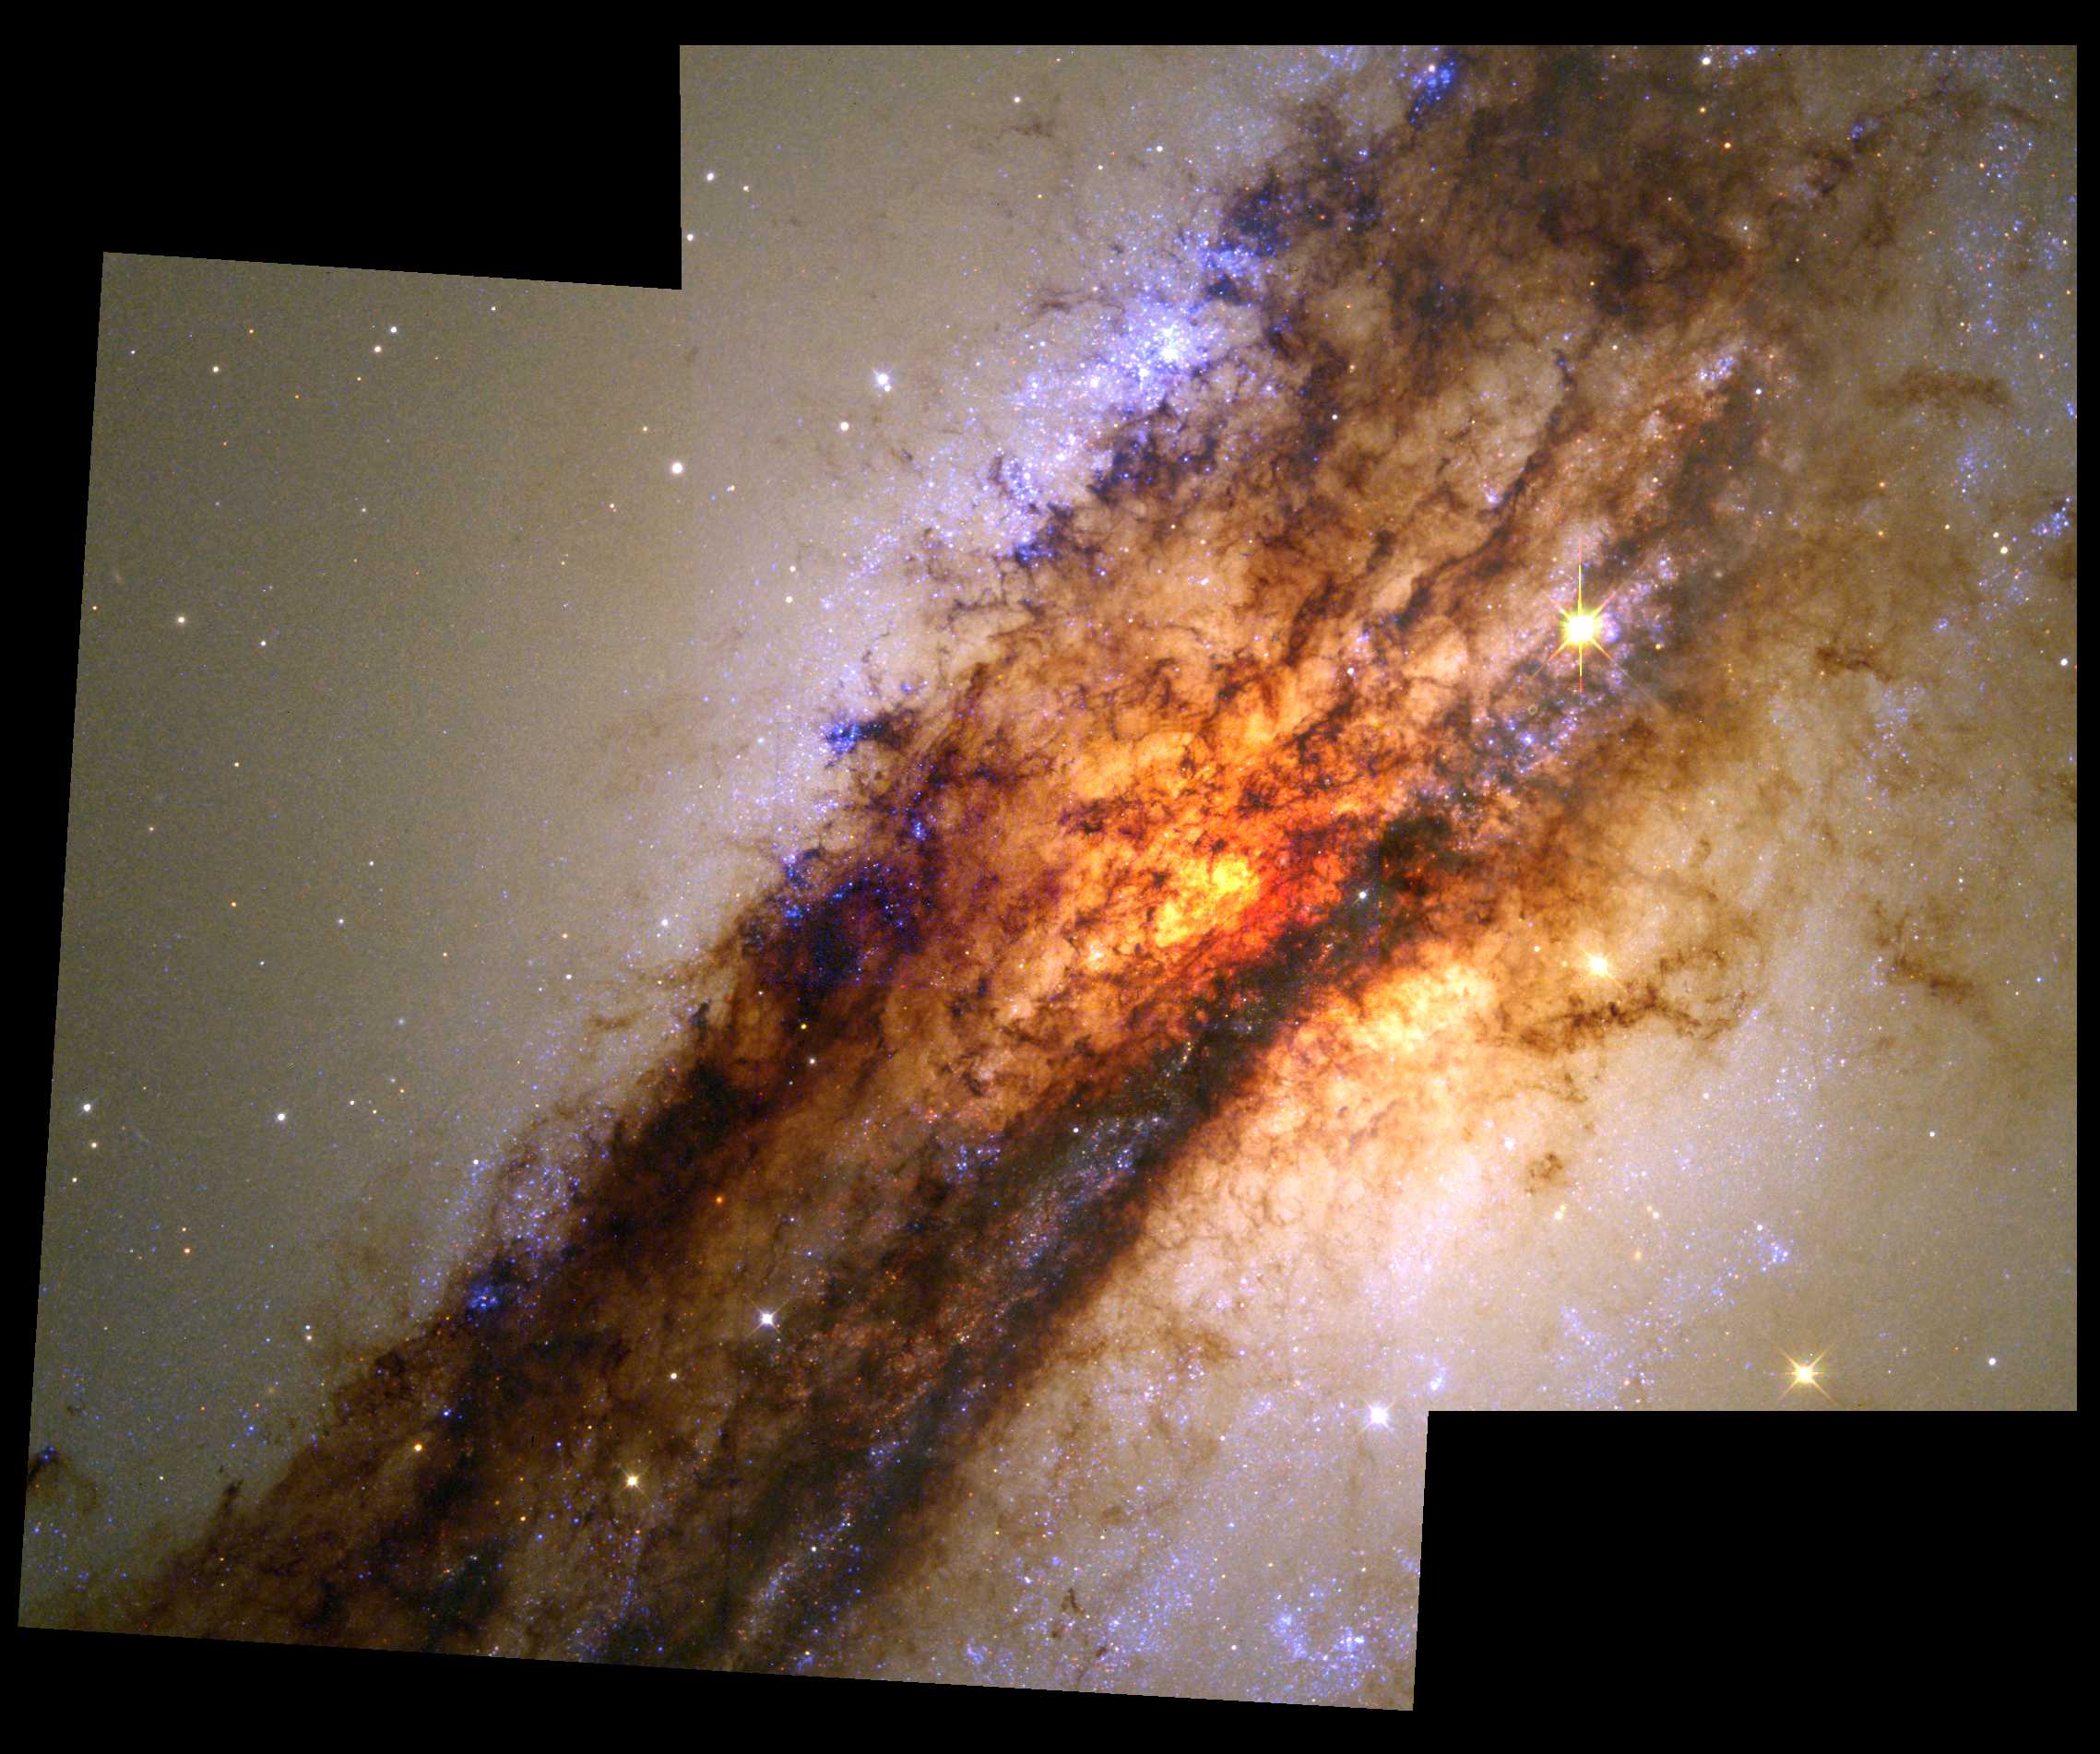

Turbulent Cauldron of Starbirth in Nearby Active Galaxy

The picture is a mosaic of two Hubble Space Telescope images taken with the Wide Field Planetary Camera 2, on Aug. 1, 1997 and Jan. 10, 1998. The approximately natural colour is assembled from images taken in blue, green and red light. Details as small as seven light-years across can be resolved. The blue colour is due to the light from extremely hot, newborn stars. The reddish-yellow colour is due in part to hot gas, in part to older stars in the elliptical galaxy and in part to scattering of blue light by dust -- the same effect that produces brilliant orange sunsets on Earth.

Credit: E.J. Schreier, (STScI) and NASA/ESA